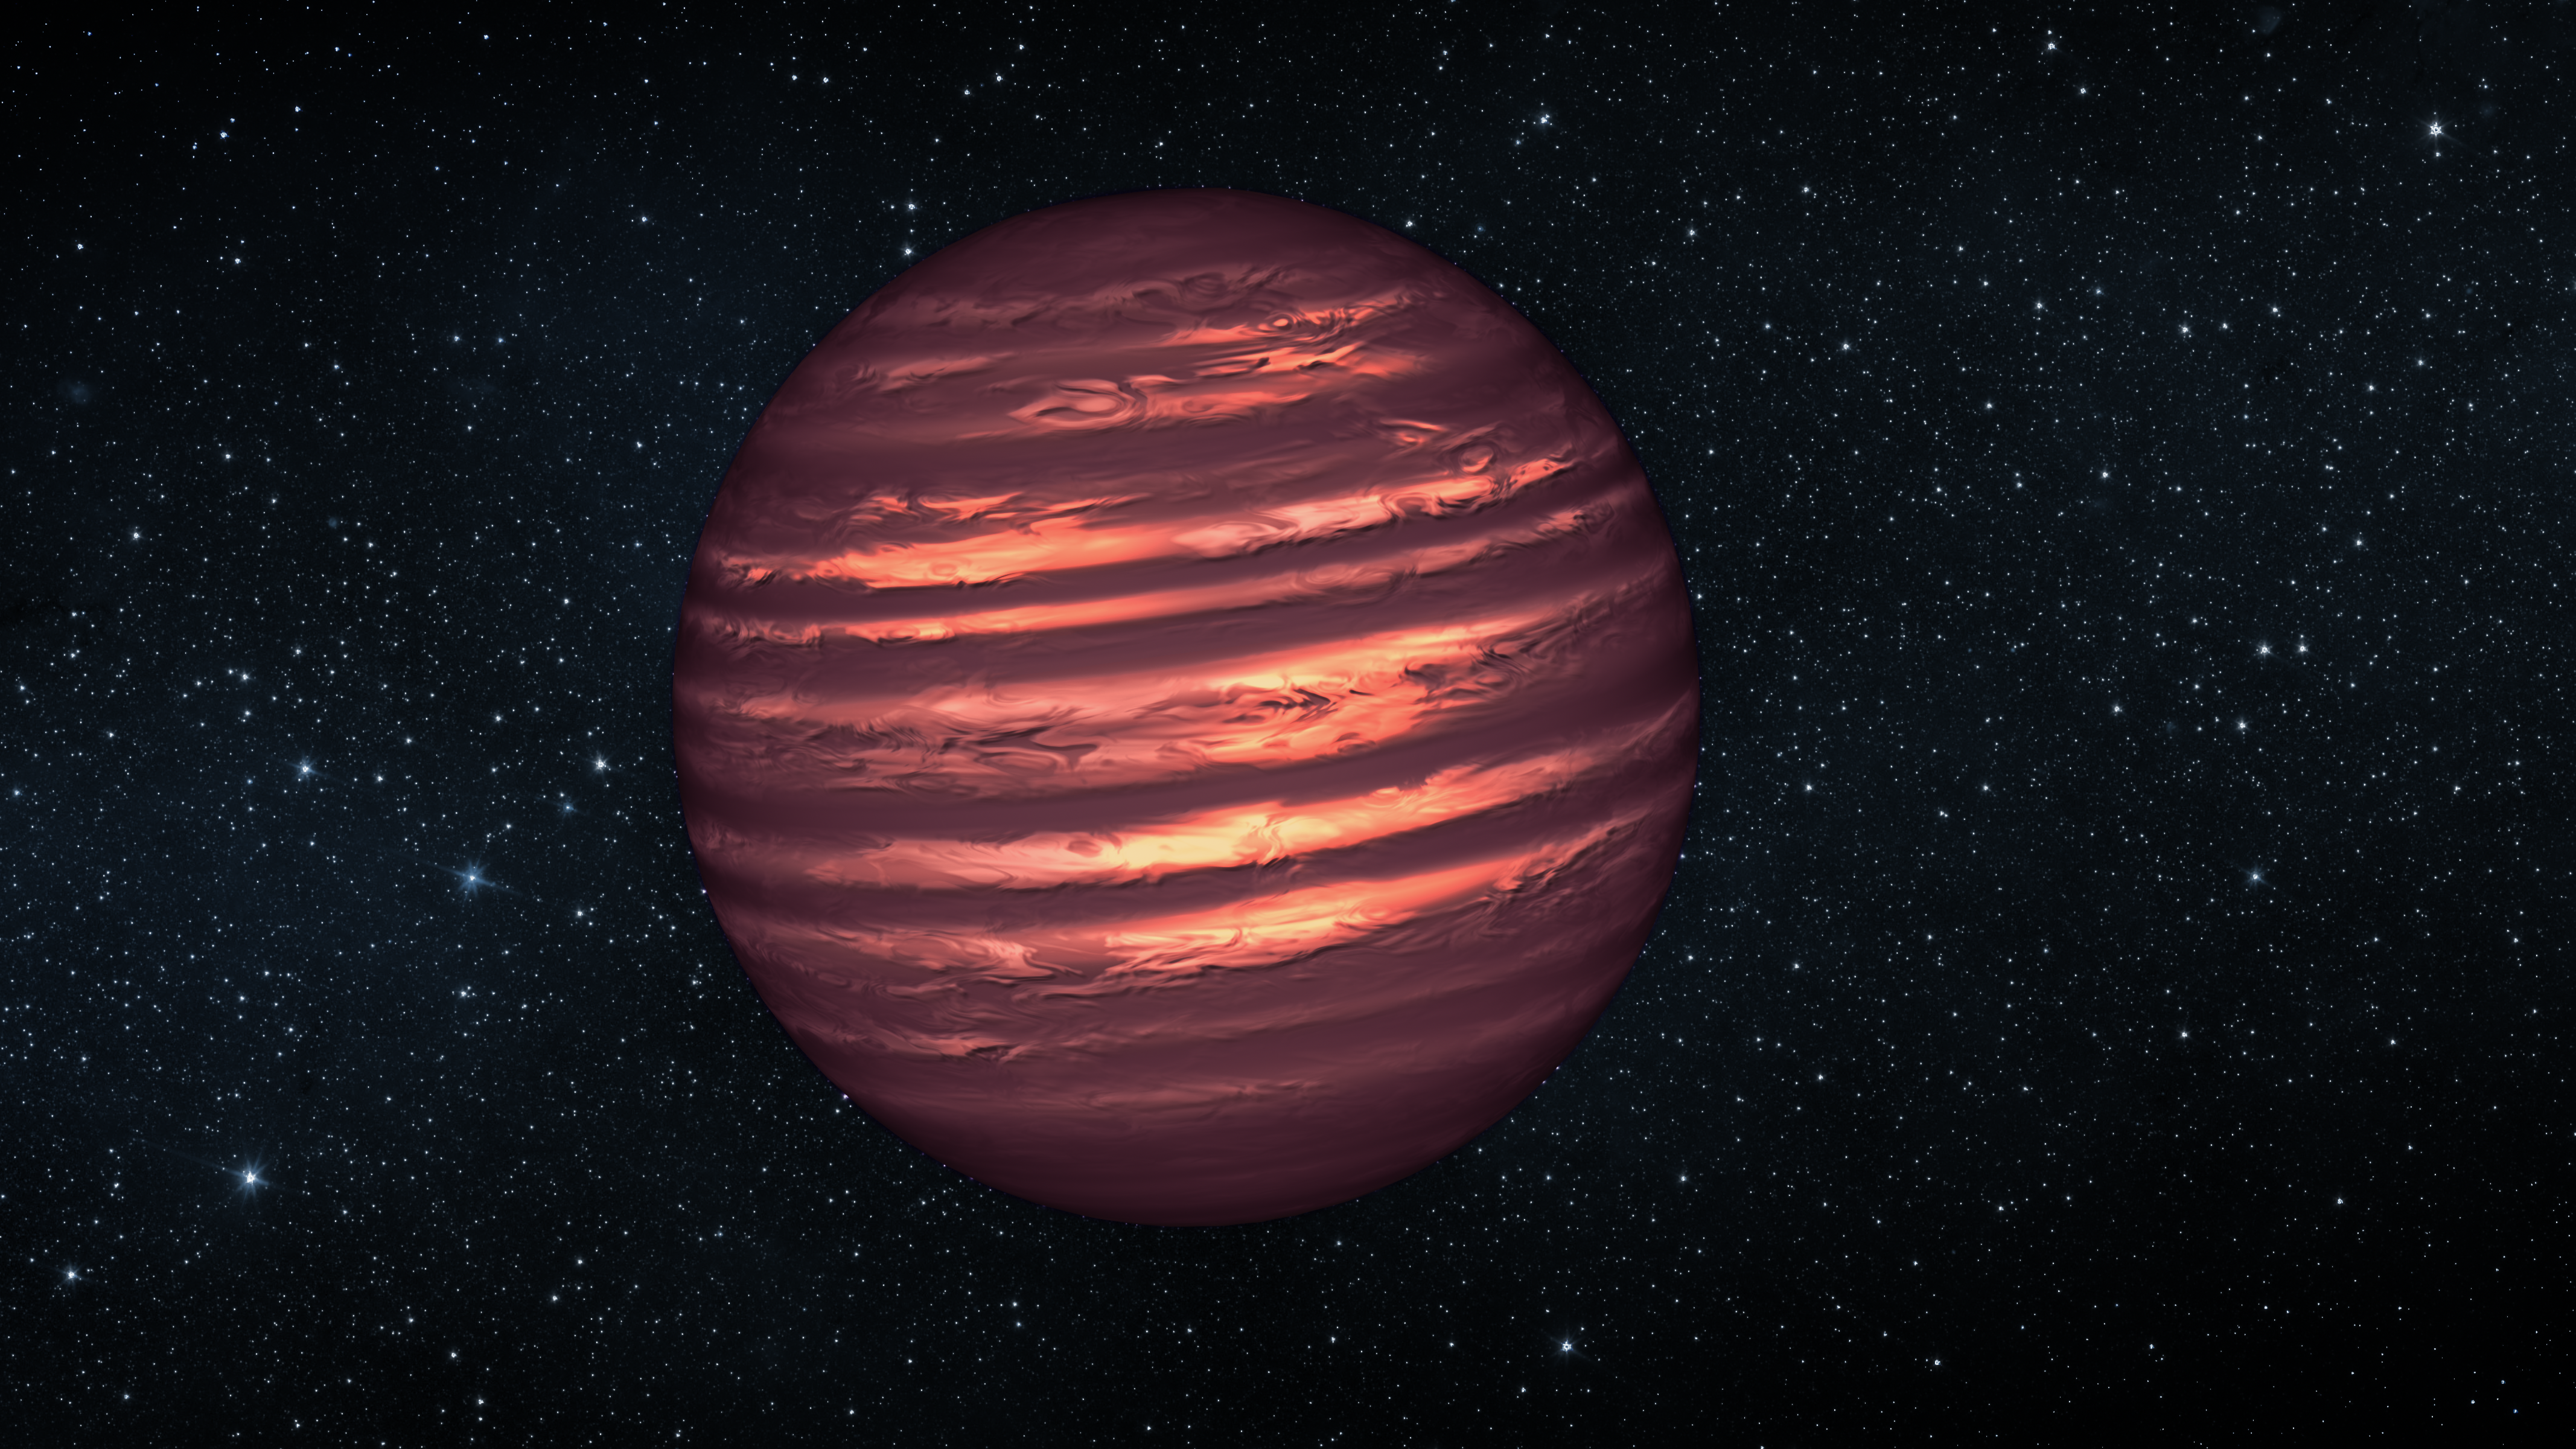

Forecast for exotic weather

This artist's conception illustrates the brown dwarf named 2MASSJ22282889-431026. The NASA/ESA Hubble and Spitzer space telescopes observed the object to learn more about its turbulent atmosphere. Brown dwarfs are more massive and hotter than planets but lack the mass required to become sizzling stars. Their atmospheres can be similar to the giant planet Jupiter's.

Hubble and Spitzer simultaneously observed the object as it rotated every 90 minutes. The results suggest wind-driven, planet-size clouds.

Credit: NASA, ESA and JPL-Caltech Science Credit: NASA, ESA and D. Apai and E. Buenzli (University of Arizona, USA)